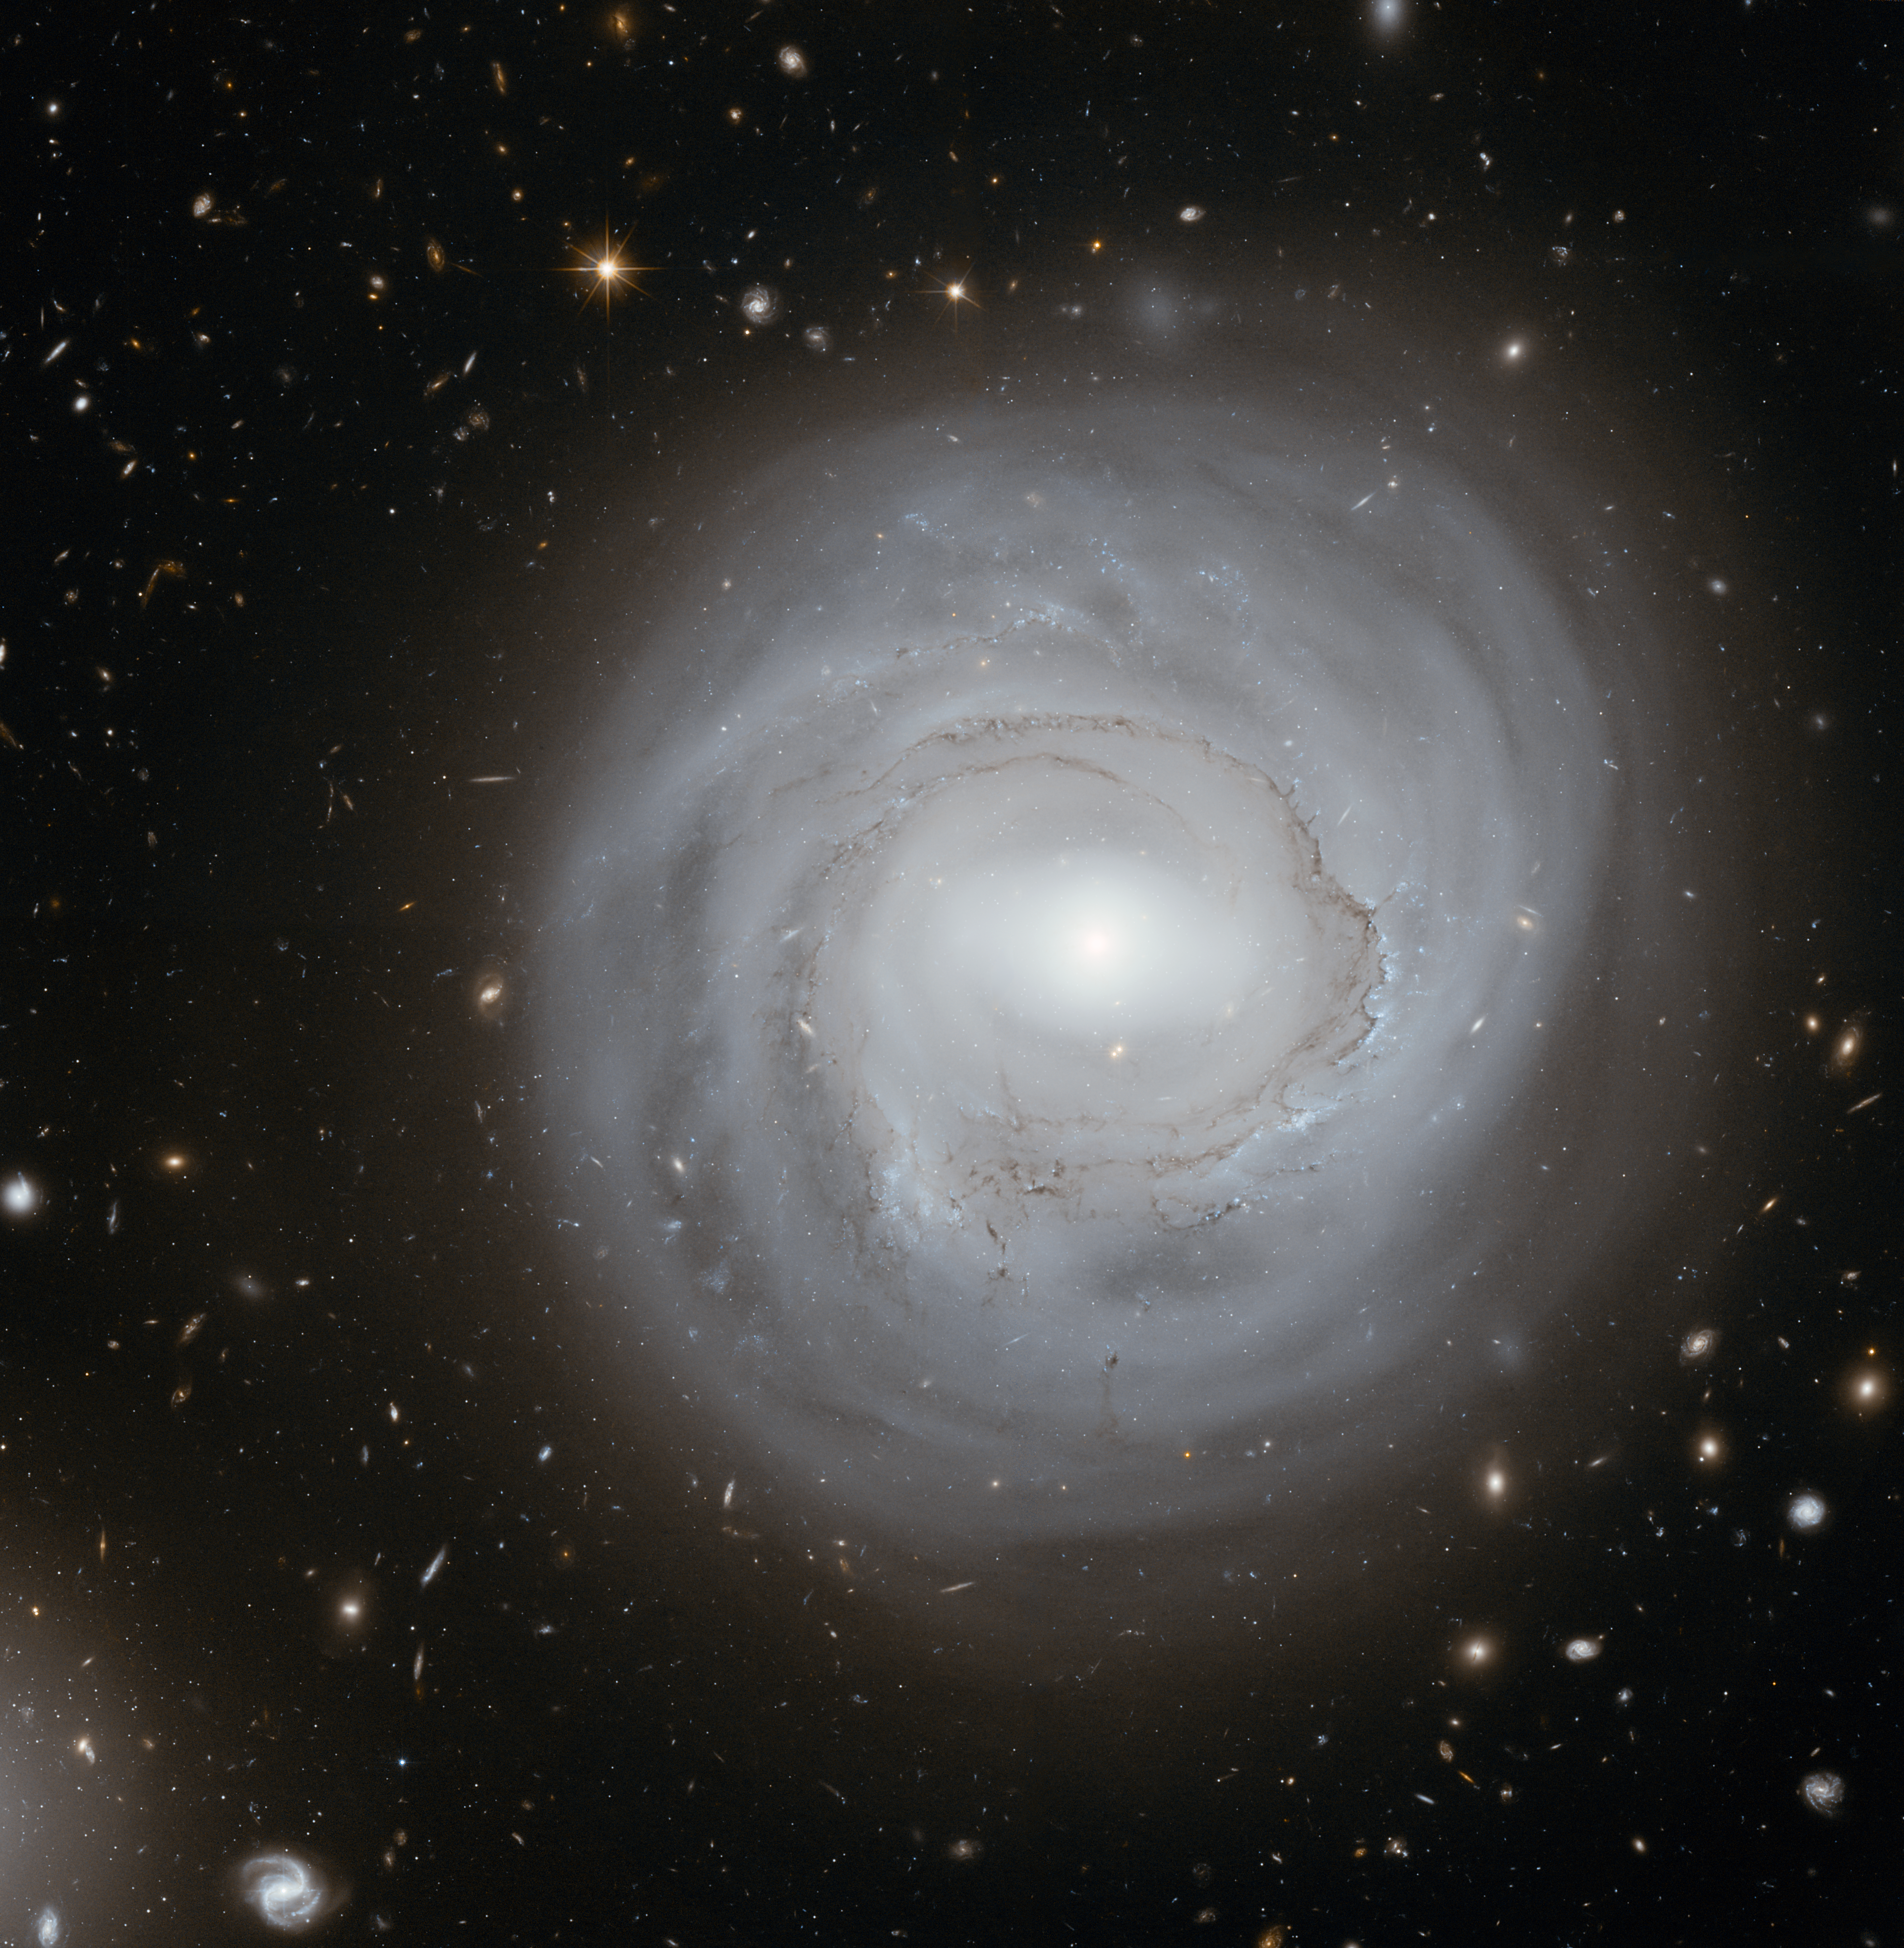

Unusual spiral NGC 4921 in the Coma Galaxy Cluster

This very deep image taken with the NASA/ESA Hubble Space Telescope shows the spiral galaxy NGC 4921 along with a spectacular backdrop of more distant galaxies. It was created from a total of 80 separate pictures through yellow and near-infrared filters.

Credit: NASA, ESA and K. Cook (Lawrence Livermore National Laboratory, USA)